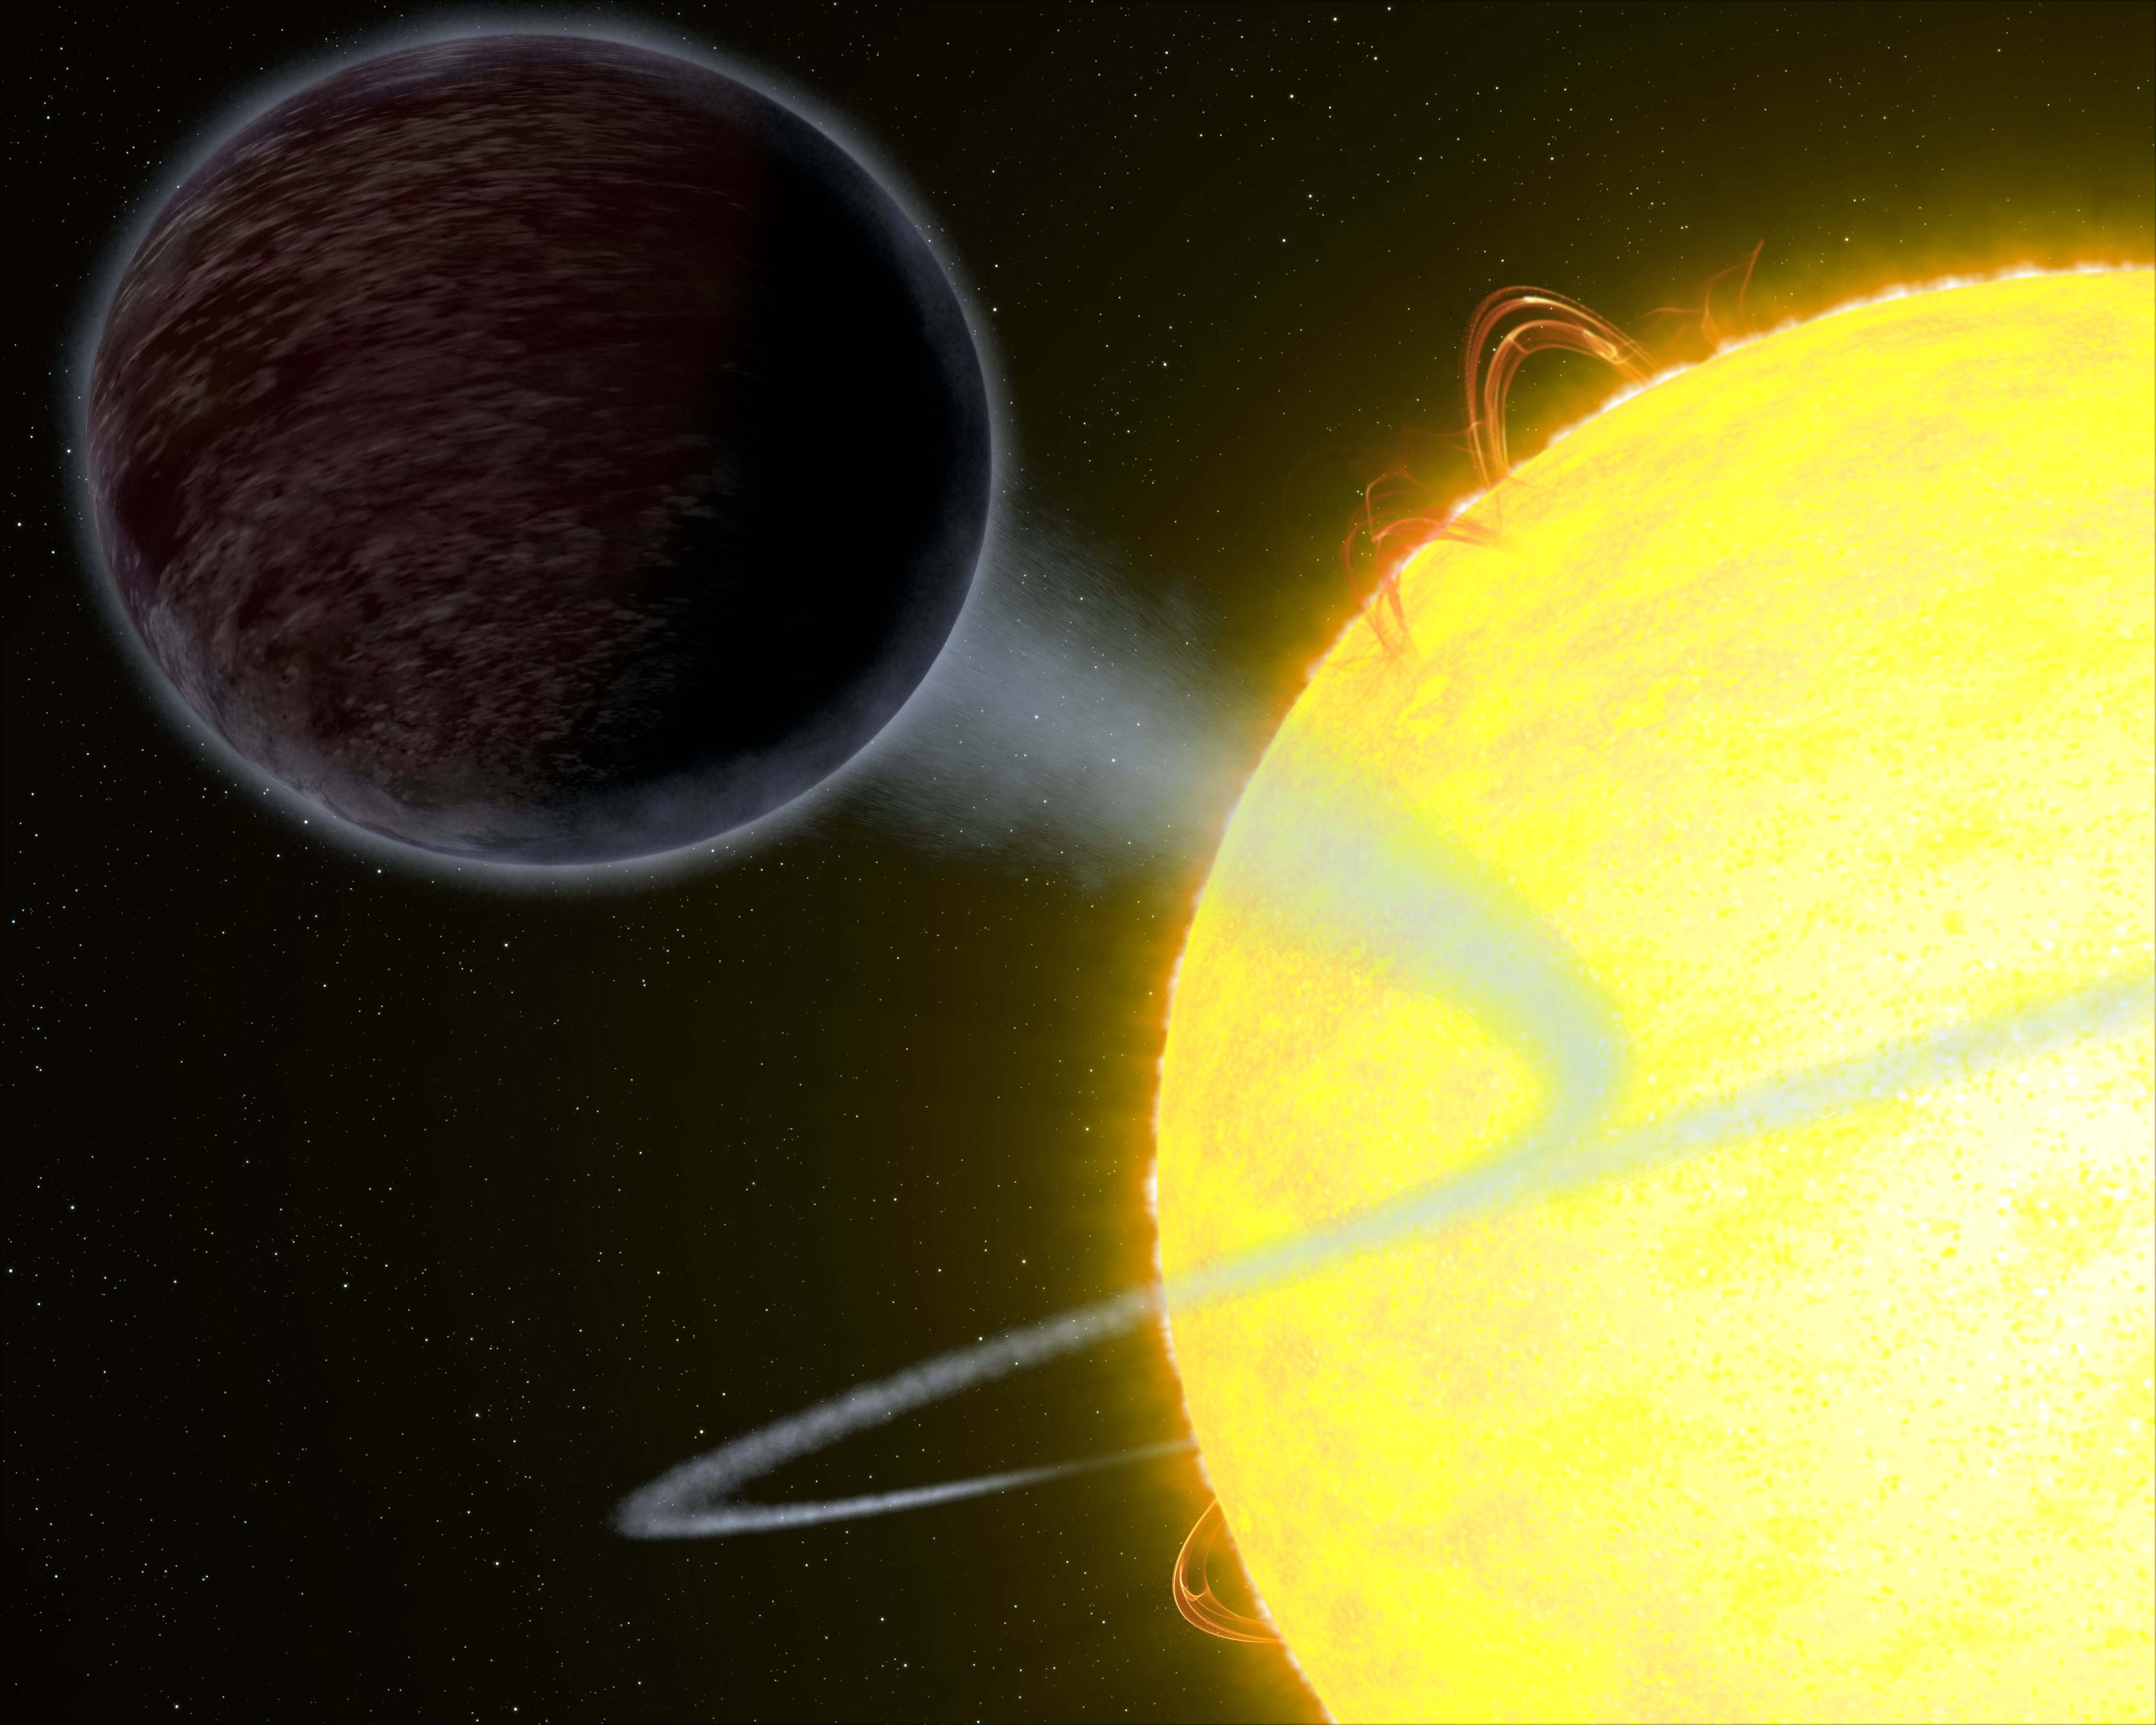

The Pitch-Black Exoplanet WASP-12b

This artist’s impression shows the exoplanet WASP-12b — an alien world as black as fresh asphalt, orbiting a star like our Sun. Scientists were able to measure its albedo: the amount of light the planet reflects. The results showed that the planet is extremely dark at optical wavelengths.

Credit: NASA, ESA, and G. Bacon (STScI)